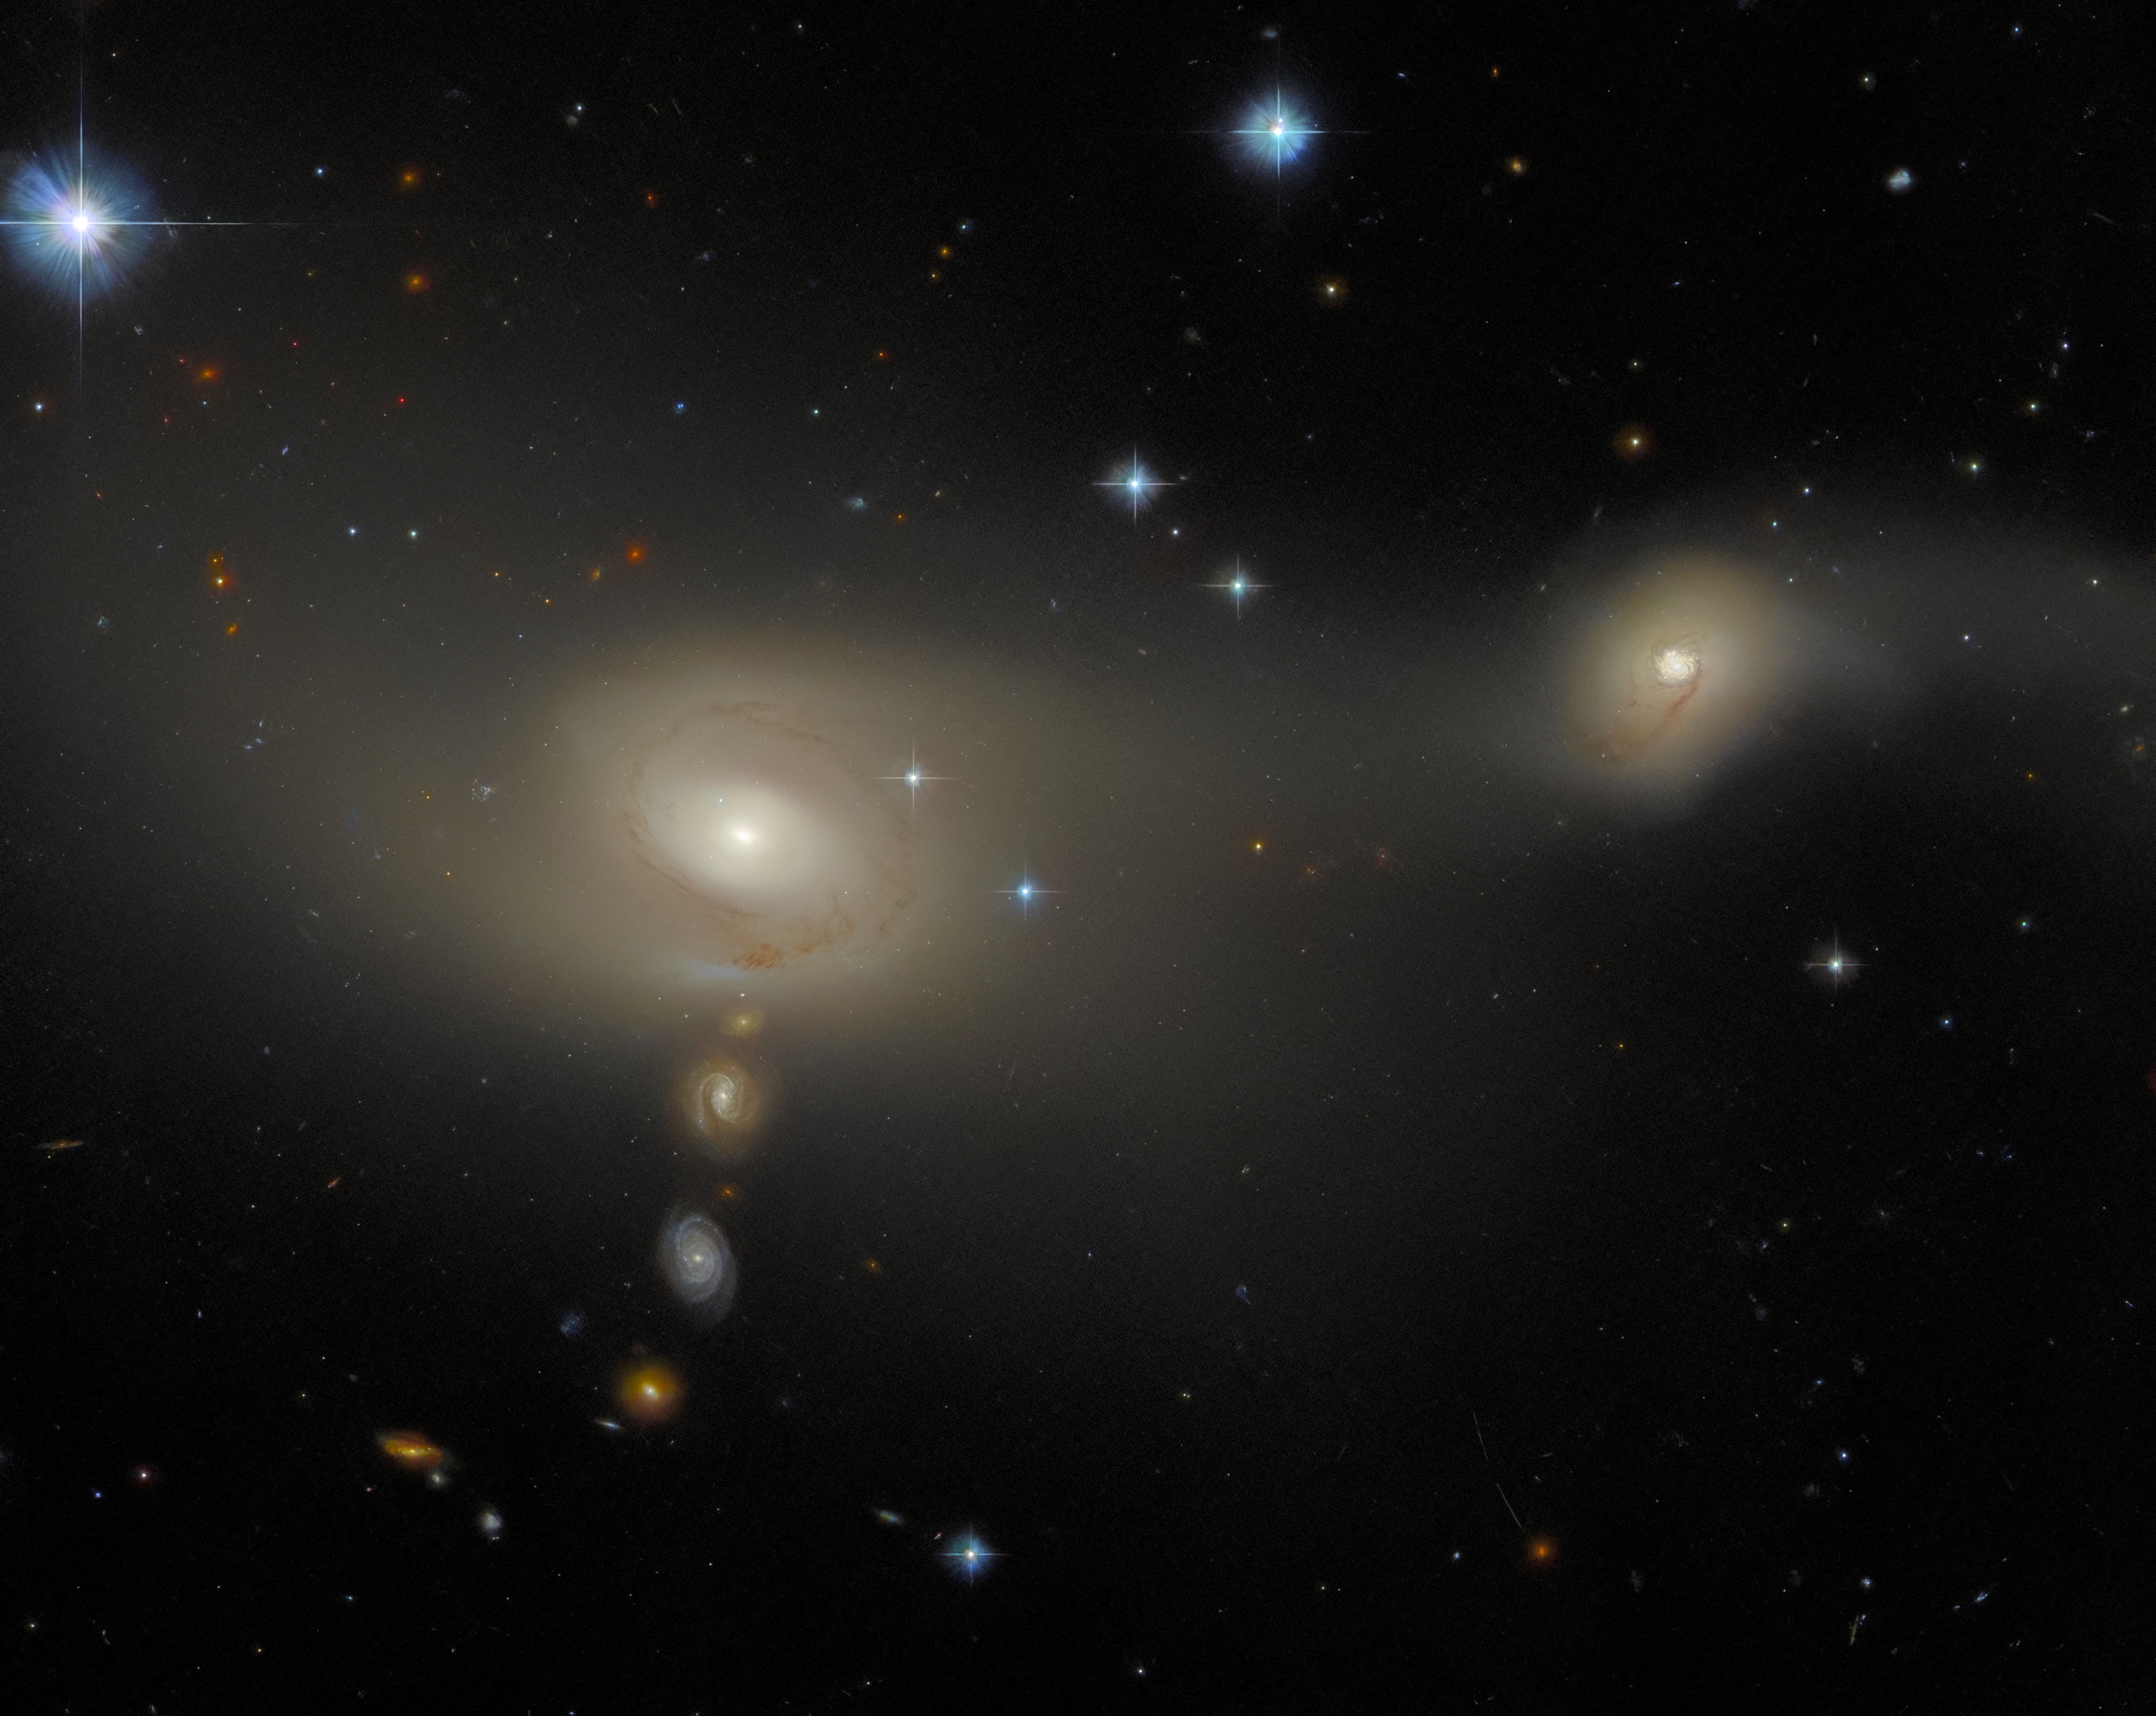

All lined up

This image features an interacting galaxy system known as Arp-Madore 2105-332, that lies about 200 million light-years from Earth in the constellation Microscopium. Like other recent Hubble Pictures of the Week, this system belongs to the Arp-Madore catalogue of peculiar galaxies. The wonderful quality of this image also reveals several further galaxies, not associated with this system but fortuitously positioned in such a way that they appear to be forming a line that approaches the leftmost (in this image) component of Arp-Madore 2105-332, which is known individually as 2MASX J21080752-3314337. The rightmost galaxy, meanwhile, is known as 2MASX J21080362-3313196. These hefty names do not lend themselves to easy memorisation, but they do actually contain valuable information: they are coordinates in the right ascension and declination system used widely by astronomers to locate astronomical objects.

Both the galaxies are of a type known as emission-line galaxies. This simply means that, when observed with spectrometers, the spectra of both galaxies exhibit characteristic bright peaks, known as emission lines. This is distinct from, for example, absorption-line galaxies whose spectra contain distinct gaps, known as absorption lines. Emission lines are produced when gases are very hot, and therefore have sufficient energy that the atoms and molecules are ‘excited’ and emit light. In other words, emission-line galaxies are highly energetic places, marking them out as likely hotbeds of star formation.

As with many galaxy types, categorising a galaxy as an emission-line galaxy does not exclude it from having other descriptions that refer to its other properties. Arp-Madore 2105-332, for example, is also a ‘peculiar’ galaxy, reflecting the atypical shapes of its two constituent galaxies.

Credit: ESA/Hubble & NASA, J. Dalcanton, Dark Energy Survey/DOE/FNAL/NOIRLab/NSF/AURA Acknowledgement: L. Shatz